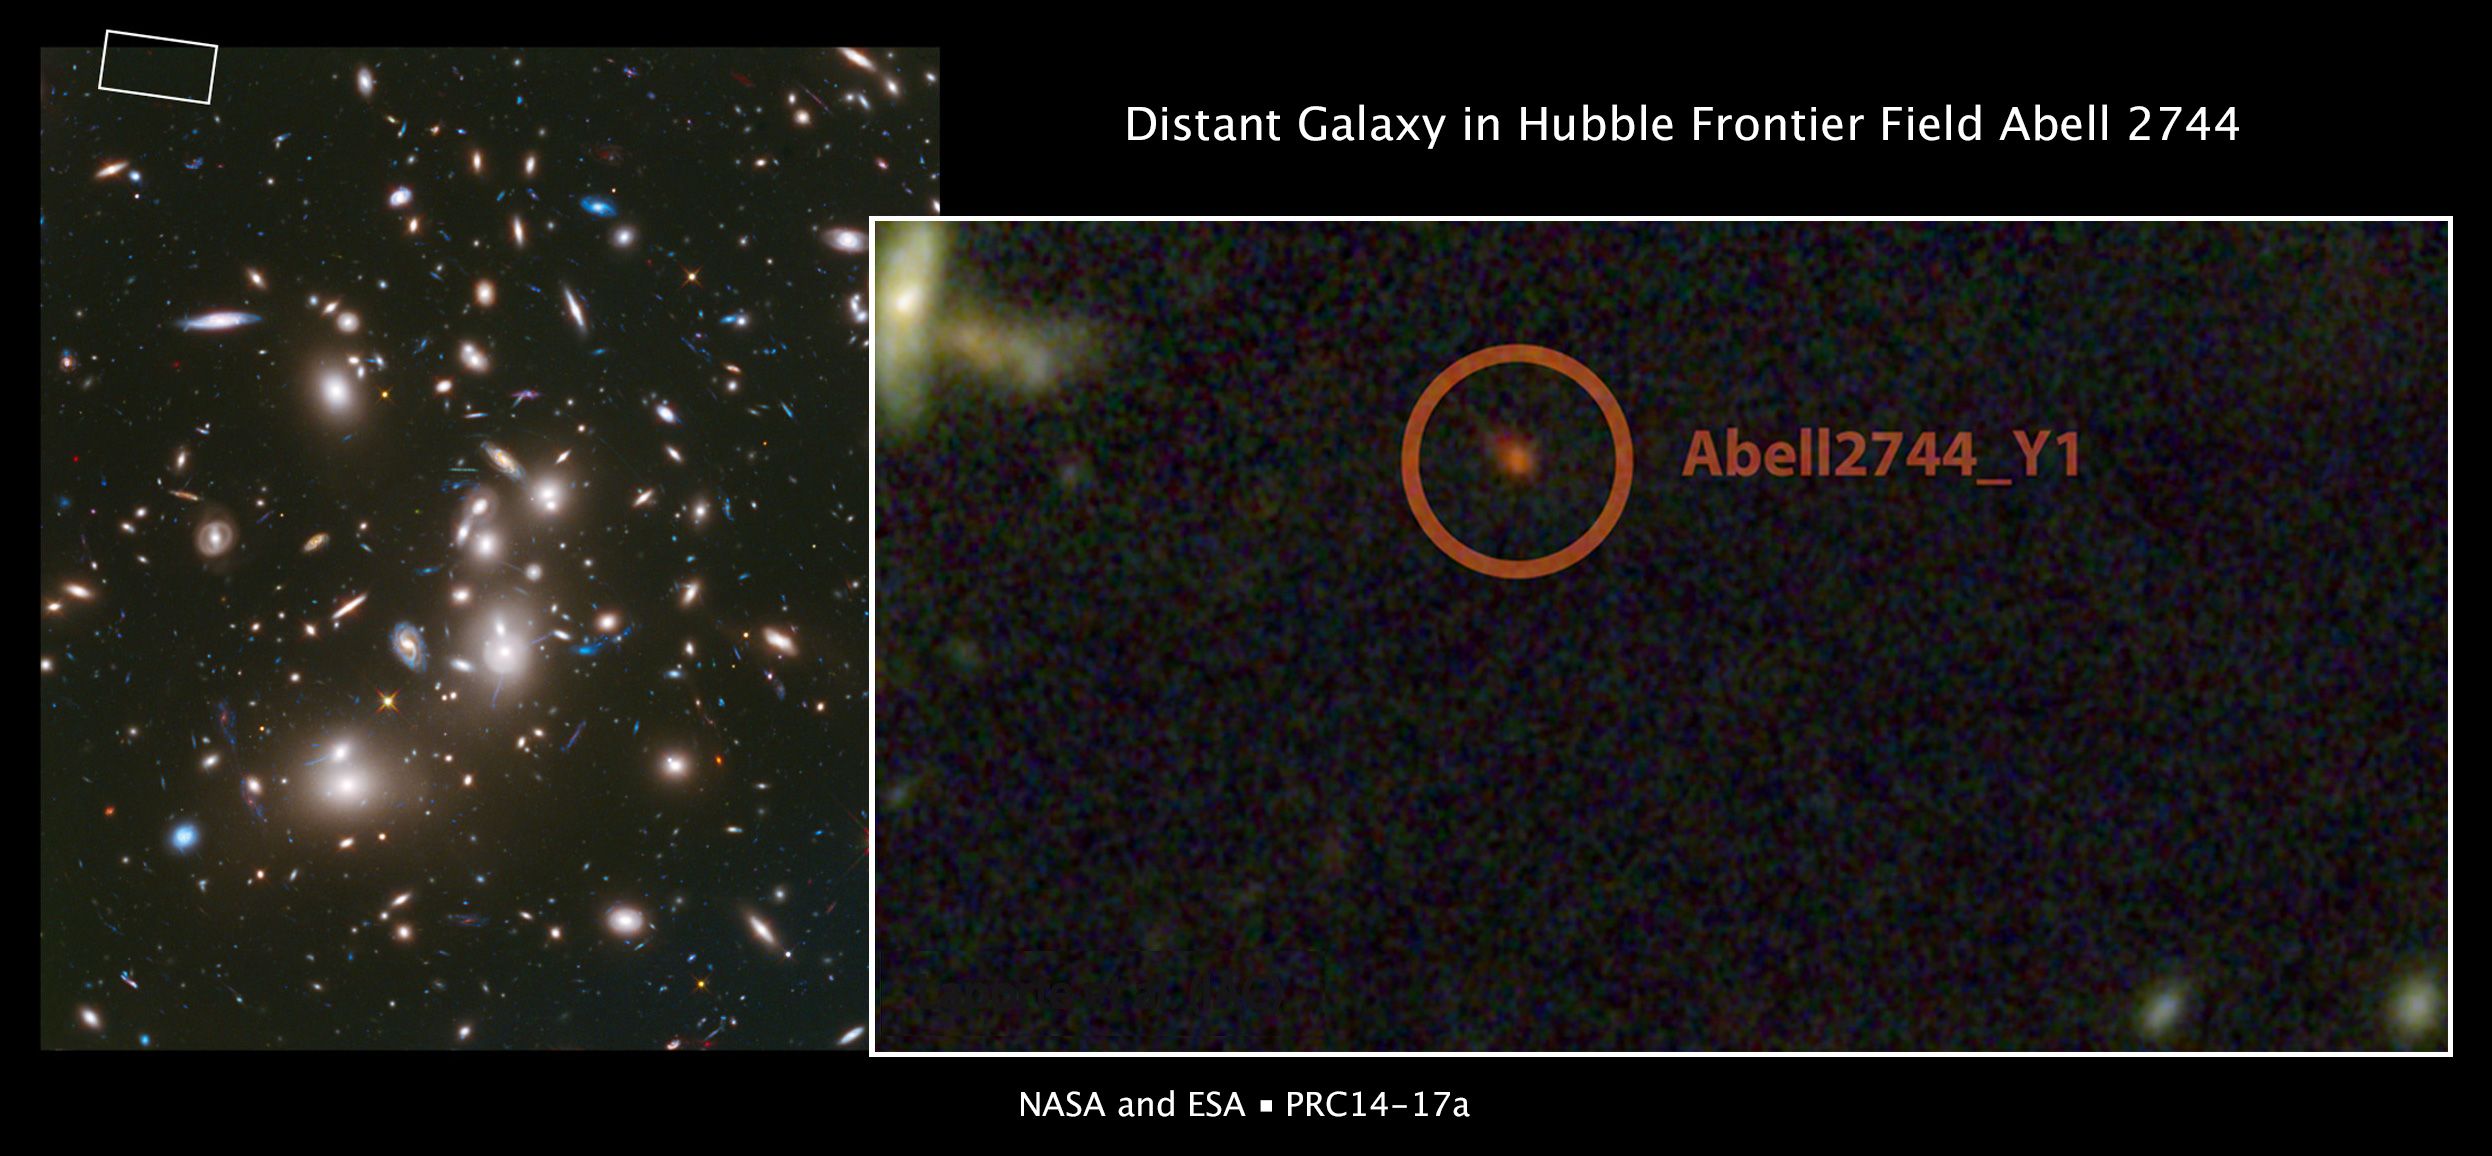

Distant galaxy in Hubble Frontier Field Abell 2744

This is a NASA/ESA Hubble Space Telescope image of galaxy cluster Abell 2744. The inset image shows the region around galaxy Abell 2744_Y1, one of the most distant galaxies yet discovered in the Universe. The image shows the galaxy as it appeared 650 million years after the Big Bang. The galaxy lies far beyond the foreground Abell 2744 cluster, but its image has been magnified and brightened by a phenomenon in the cluster known as gravitational lensing. This image was taken as part of the Frontiers Fields observing program.

Credit: NASA, ESA, and J. Lotz, M. Mountain, A. Koekemoer, and the HFF Team (STScI), and N. Laporte (Instituto de Astrofisica de Canarias)
Science Credit: NASA, ESA, N. Laporte and A. Streblyanska (Instituto de Astrofisica de Canarias and Universidad de La Laguna), B. Clement (University of Arizona), I. Perez-Fournon (Instituto de Astrofisica de Canarias and Universidad de La Laguna), D. Schaerer (CNRS and Observatoire de Genève), H. Atek (Observatoire de Sauverny), F. Boone (CNRS and Université de Toulouse), J.-P. Kneib (Observatoire de Sauverny and Laboratoire d’Astrophysique de Marseille), E. Egami (University of Arizona), P. Martínez-Navajas and R. Marques-Chaves (Instituto de Astrofisica de Canarias and Universidad de La Laguna), R. Pelló (CNRS and Université de Toulouse), and J. Richard (Observatoire de Lyon)